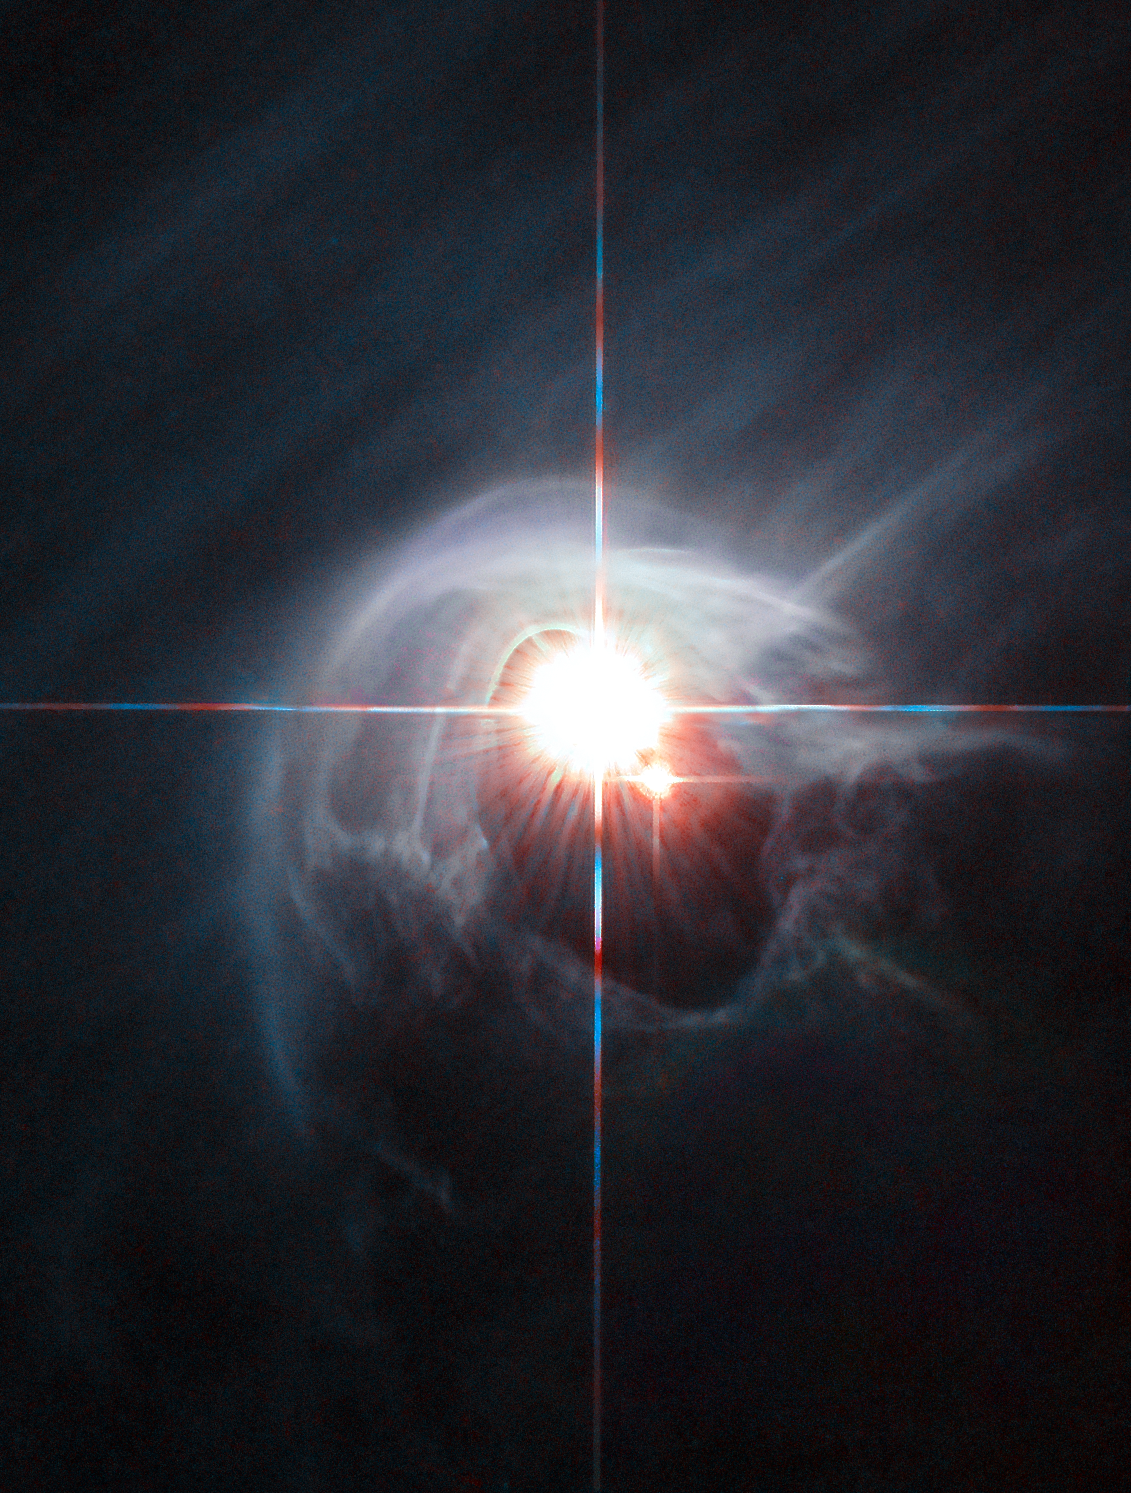

Smoke ring for a halo

Two stars shine through the centre of a ring of cascading dust in this image taken by the NASA/ESA Hubble Space Telescope. The star system is named DI Cha, and while only two stars are apparent, it is actually a quadruple system containing two sets of binary stars.

As this is a relatively young star system it is surrounded by dust. The young stars are moulding the dust into a wispy wrap.

The host of this alluring interaction between dust and star is the Chamaeleon I dark cloud — one of three such clouds that comprise a large star-forming region known as the Chamaeleon Complex. DI Cha's juvenility is not remarkable within this region. In fact, the entire system is among not only the youngest but also the closest collections of newly formed stars to be found and so provides an ideal target for studies of star formation.

Credit: ESA/Hubble & NASA Acknowledgement: Judy Schmidt (geckzilla.org)